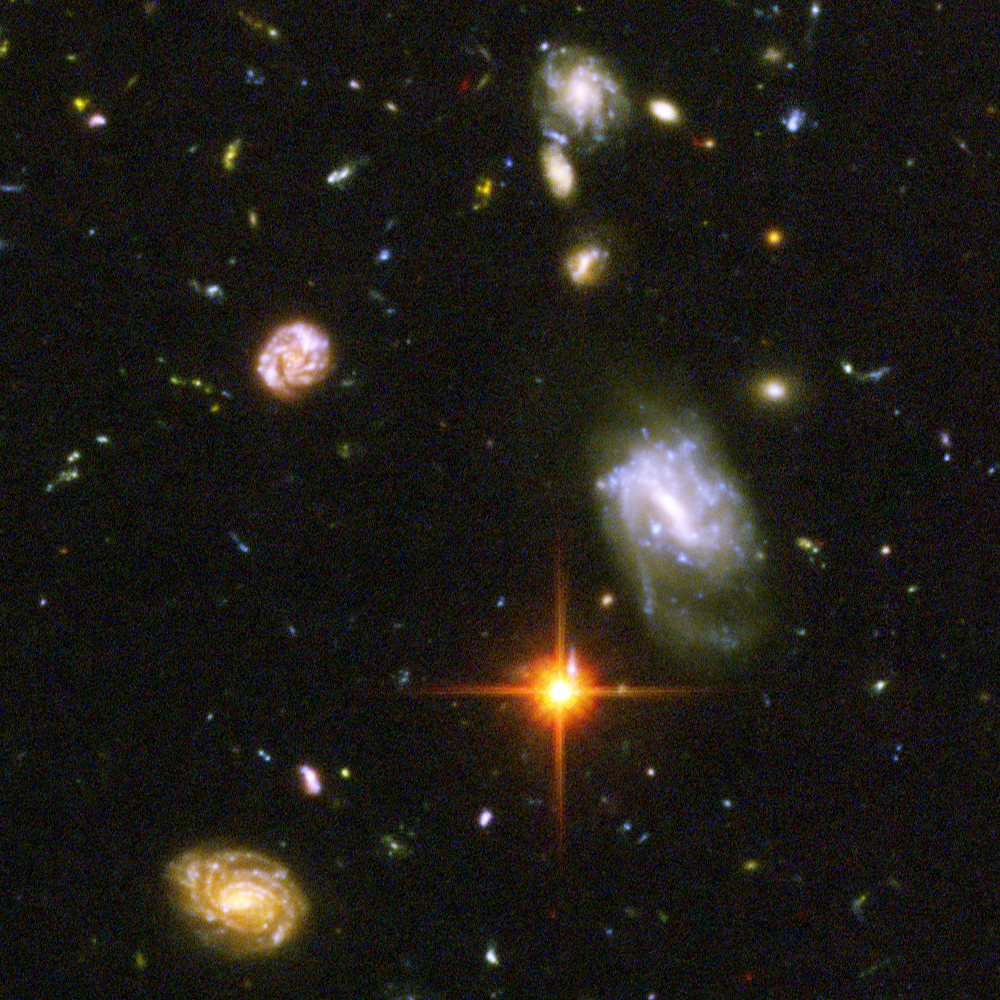

Hubble reveals galactic drama [image 5]

A galactic brawl. A close encounter with a spiral galaxy. Blue wisps of galaxies. These close-up snapshots of galaxies in the Hubble Ultra Deep Field reveal the drama of galactic life.

The galaxies in this panel were plucked from a harvest of nearly 10,000 galaxies in the Ultra Deep Field, the deepest visible-light image of the cosmos.

The Ultra Deep Field observations, taken by the Advanced Camera for Surveys, represent a narrow, "deep" view of the cosmos. Peering into the Ultra Deep Field is like looking through a 2.5 metre-long soda straw.

In ground-based images, the patch of sky in which the galaxies reside (just one-tenth the diameter of the full Moon) is largely empty. Located in the constellation Fornax, the region is so empty, in fact, that only a handful of stars within the Milky Way galaxy can be seen in the image.

In this image, blue and green correspond to colours that can be seen by the human eye, such as hot, young, blue stars and the glow of Sun-like stars in the disks of galaxies. Red represents near-infrared light, which is invisible to the human eye, such as the red glow of dust-enshrouded galaxies.

The image required 800 exposures taken over the course of 400 Hubble orbits around Earth. The total amount of exposure time was 11.3 days, taken between Sept. 24, 2003 and Jan. 16, 2004.

Credit: NASA, ESA, and S. Beckwith (STScI) and the HUDF Team